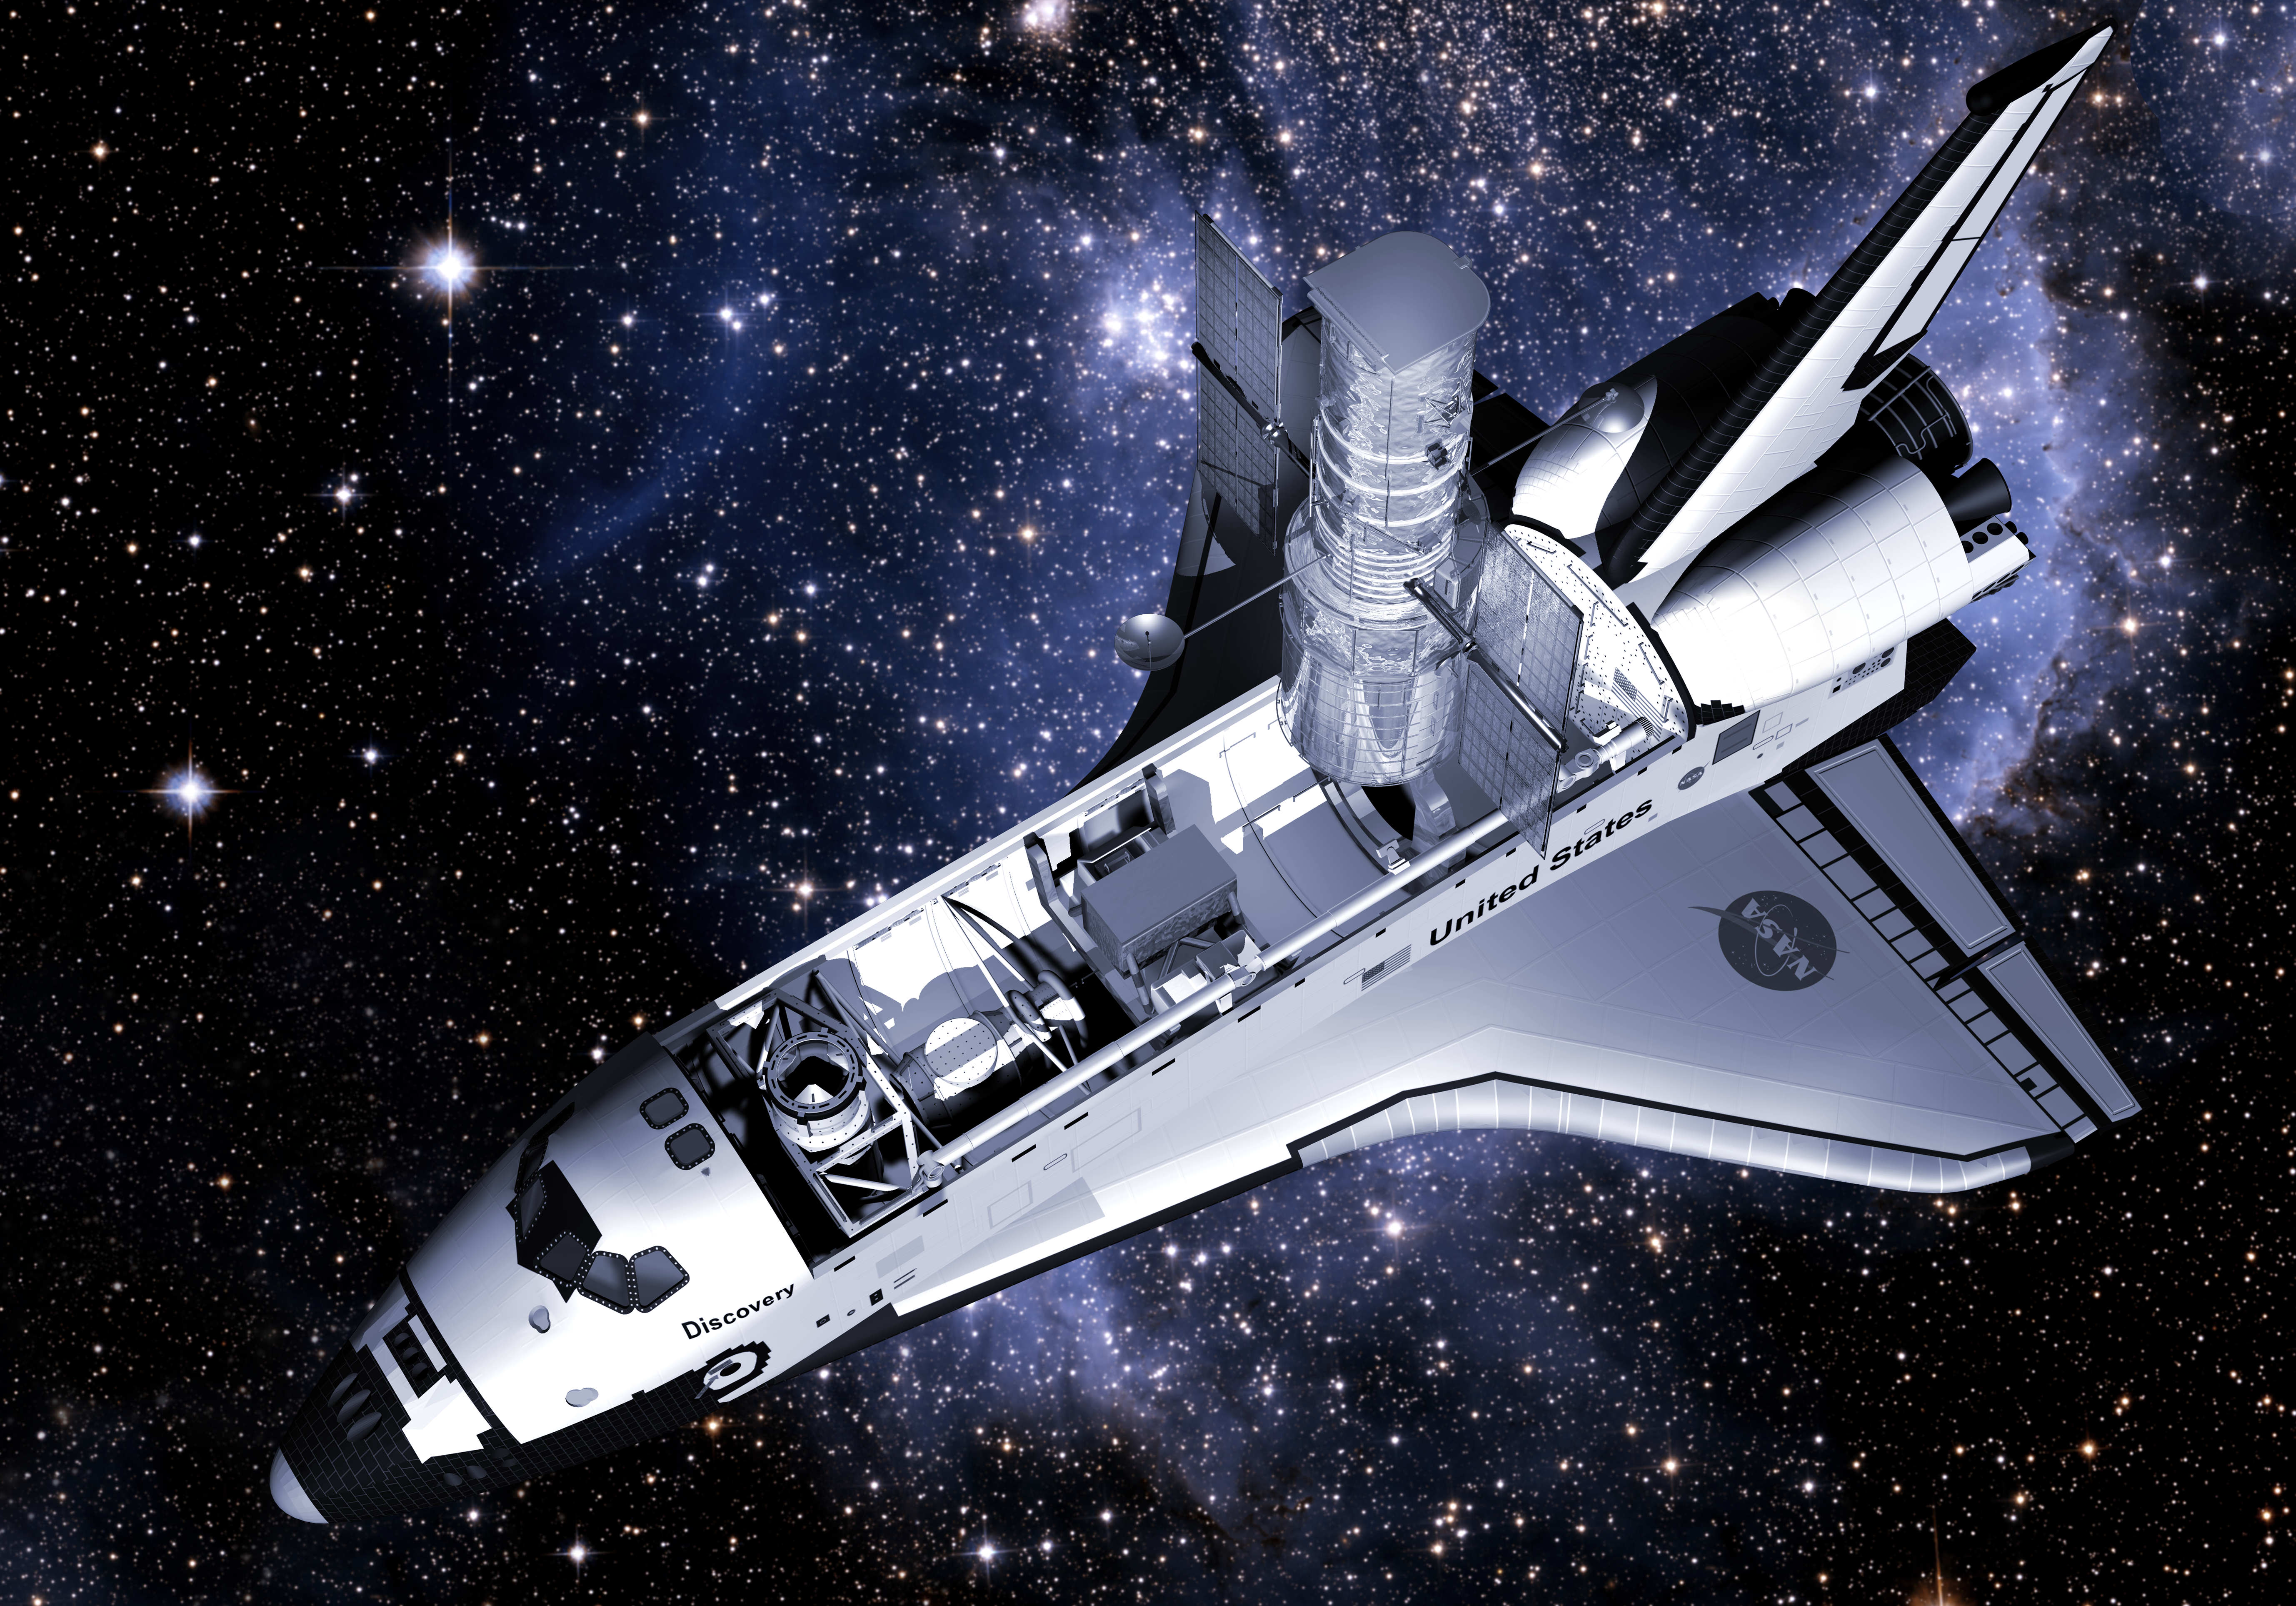

HST Servicing Mission in 3D

HST Servicing Mission in 3D

Credit: NASA and ESA